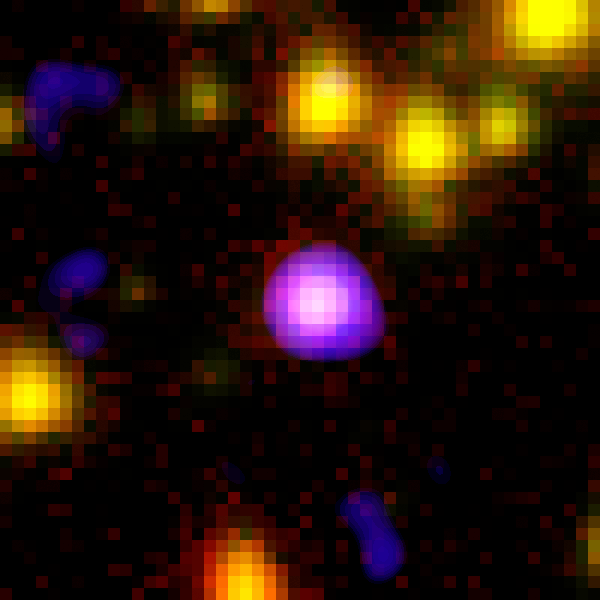

Spitzer+Chandra: Object #3 53.057987-27.833524

The combined power of NASA's Great Observatories - the Hubble Space Telescope, the Chandra X-ray Observatory, and the Spitzer Space Telescope - have been combined to find a hidden population of supermassive black holes in the universe. It took the penetrating view of Spitzer to finally uncover the black holes and their surrounding galaxies.

Credit: NASA, ESA, A. M. Koekemoer (STScI), M. Dickinson (NOAO) and The GOODS Team